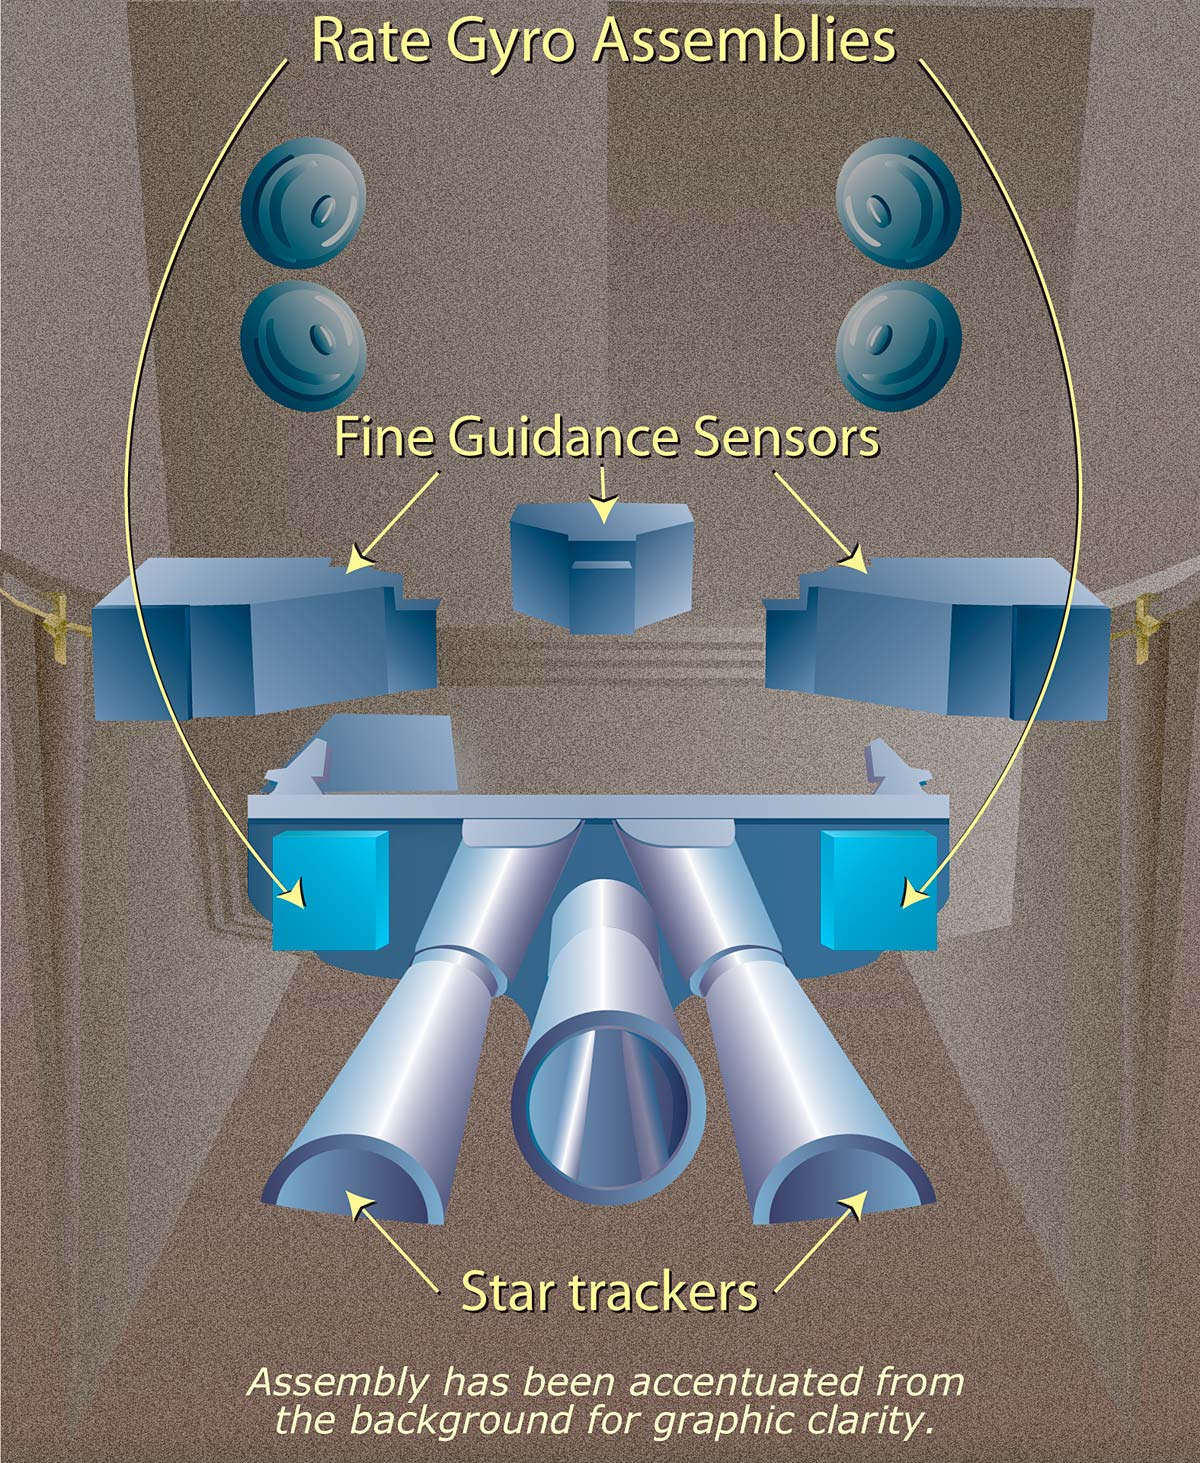

Hubble Space Telescope rate gyro assemblies

Hubble has a sophisticated system that controls its position 24 hours a day. It is called the Pointing Control System (PCS). The PCS is composed of Gyroscopes, reaction wheels, and fine guidance sensors.

Credit: NASA, ESA, A. Feild (STScI), and Lockheed Martin